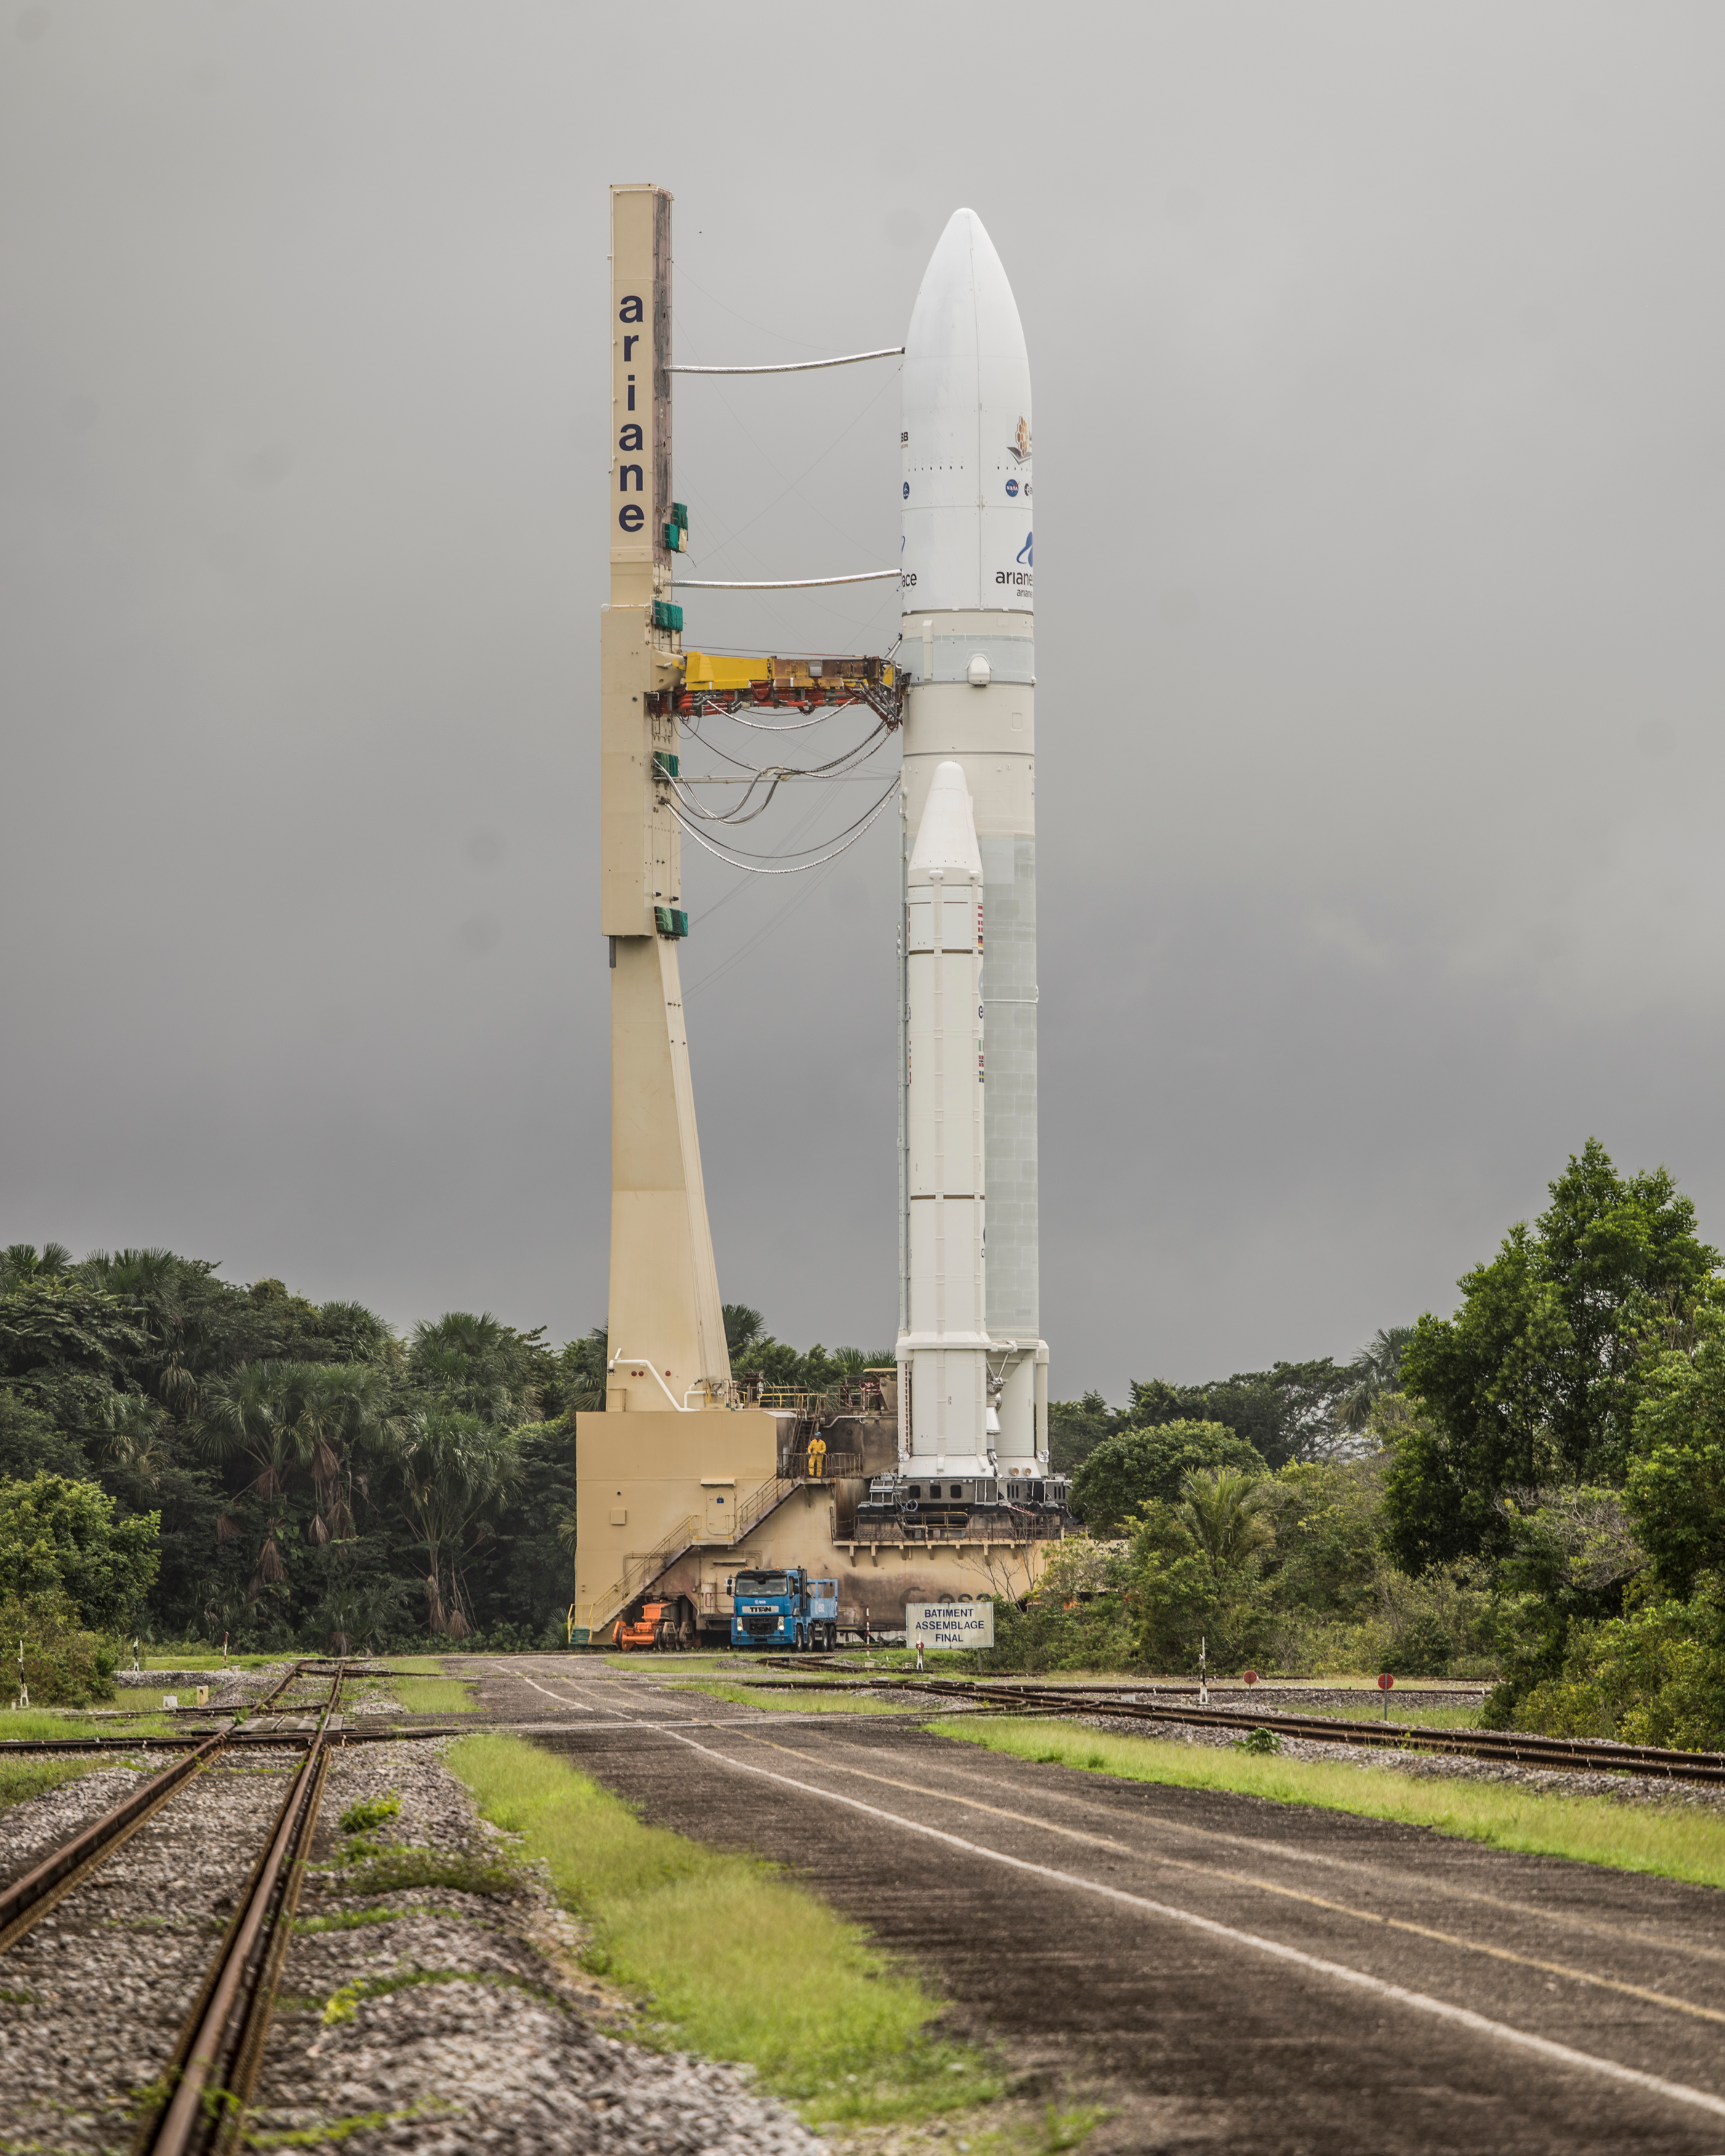

Ariane 5 with James Webb Space Telescope Prelaunch

Arianespace's Ariane 5 rocket with NASA’s James Webb Space Telescope onboard, is rolled out to the launch pad, Thursday, Dec. 23, 2021, at Europe’s Spaceport, the Guiana Space Center in Kourou, French Guiana. The James Webb Space Telescope (sometimes called JWST or Webb) is a large infrared telescope with a 21.3 foot (6.5 meter) primary mirror. The observatory will study every phase of cosmic history—from within our solar system to the most distant observable galaxies in the early universe.

Credit: NASA/Chris Gunn